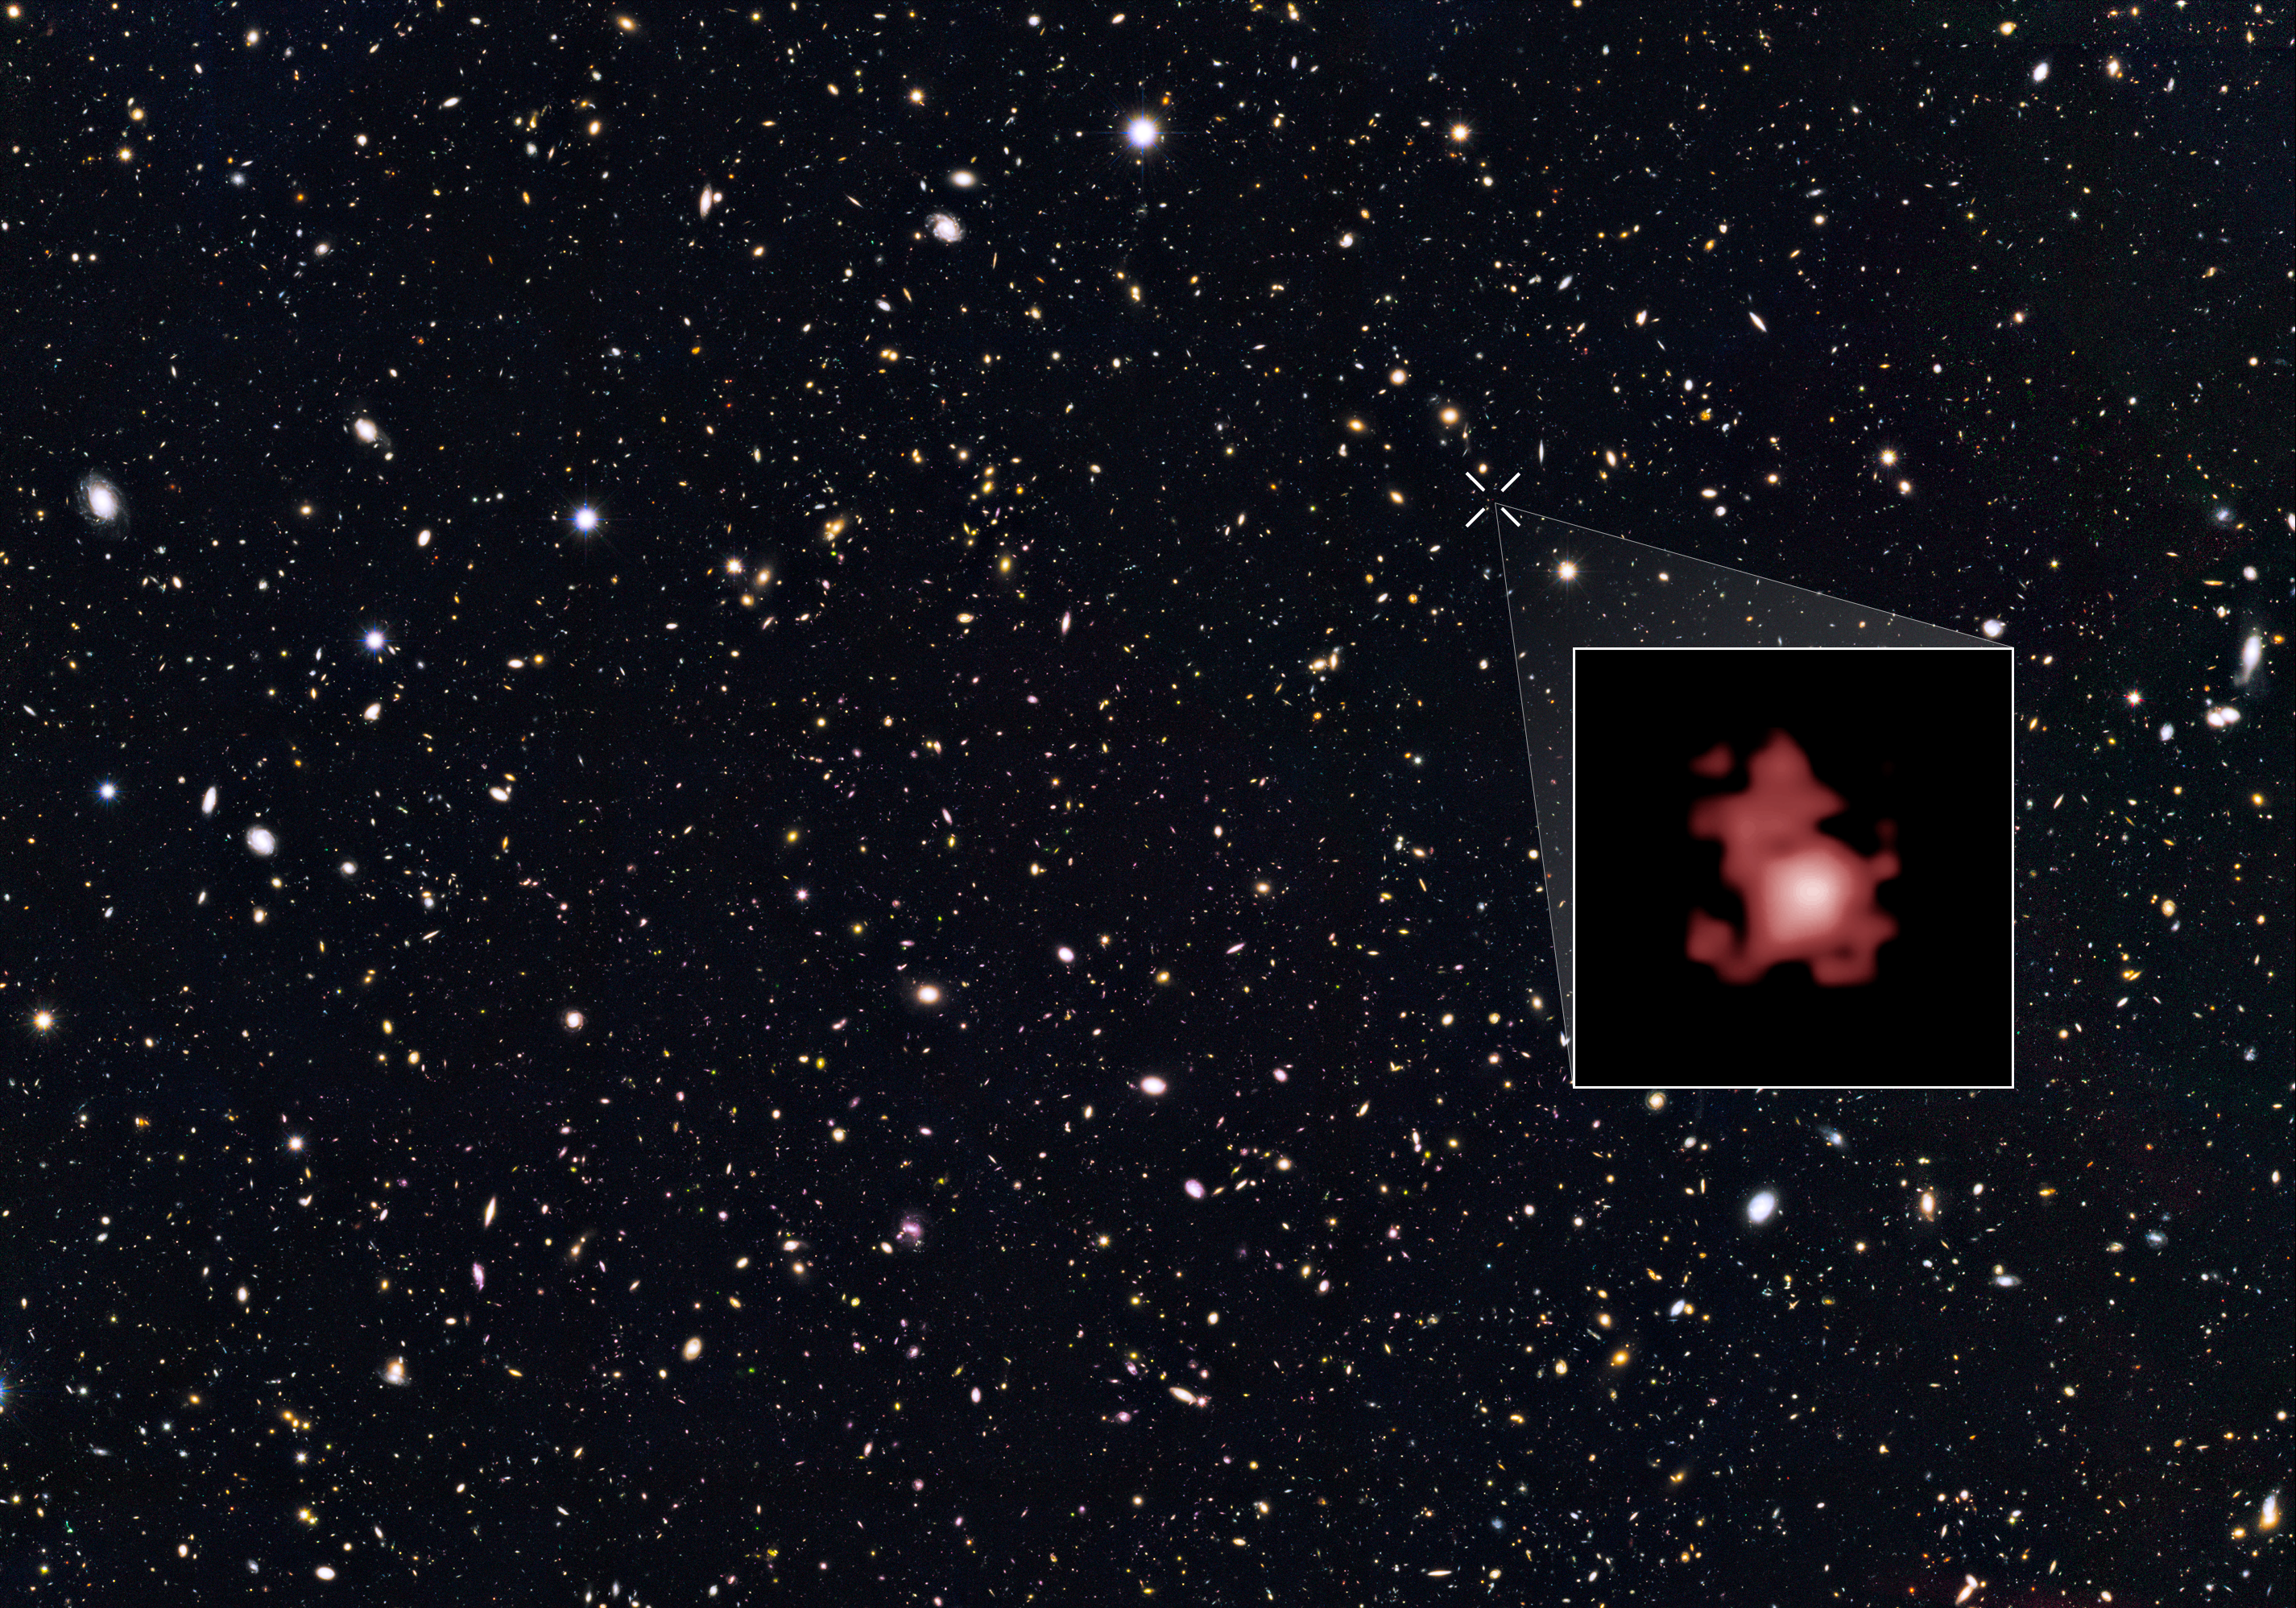

Most distant galaxy

This image shows the position of the most distant galaxy discovered so far within a deep sky Hubble Space Telescope survey called GOODS North (Great Observatories Origins Deep Survey North). The survey field contains tens of thousands of galaxies stretching far back into time.

The remote galaxy GN-z11, shown in the inset, existed only 400 million years after the Big Bang, when the Universe was only 3 percent of its current age. It belongs to the first generation of galaxies in the Universe and its discovery provides new insights into the very early Universe. This is the first time that the distance of an object so far away has been measured from its spectrum, which makes the measurement extremely reliable.

GN-z11 is actually ablaze with bright, young, blue stars but these look red in this image because its light was stretched to longer, redder, wavelengths by the expansion of the Universe.

Credit: NASA, ESA, and P. Oesch (Yale University)